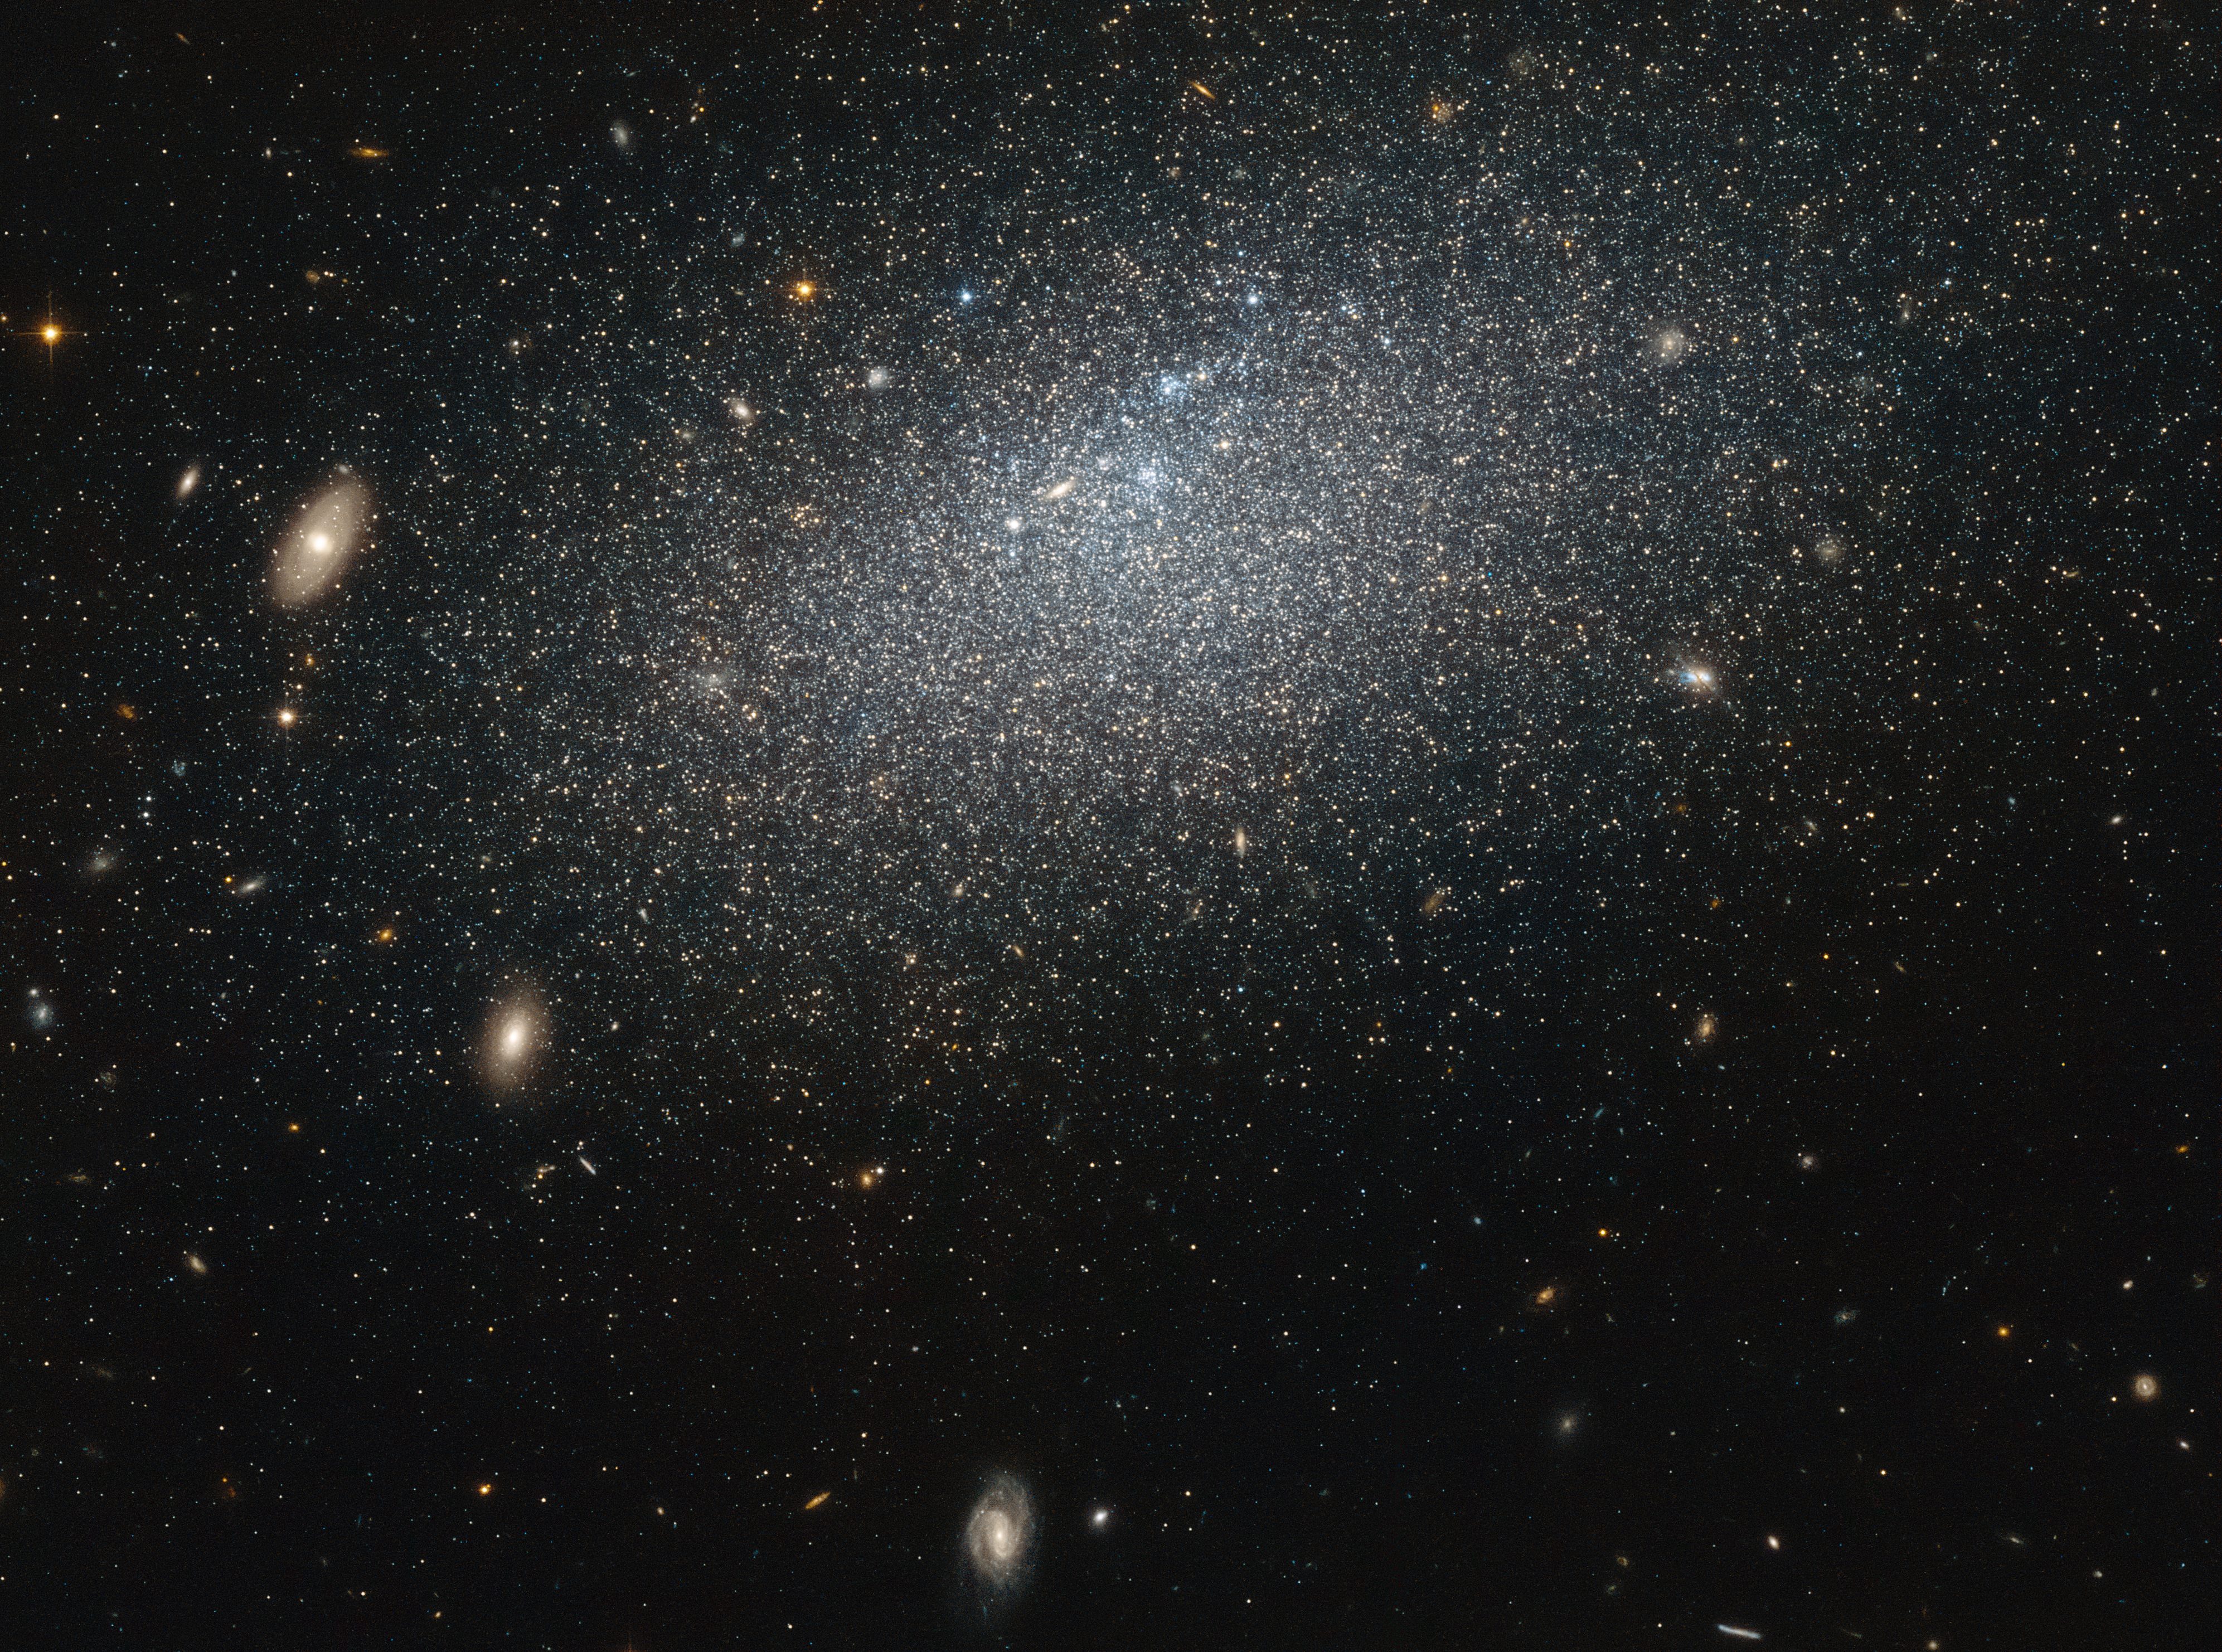

A mysterious hermit

The drizzle of stars scattered across this image forms a galaxy known as UGC 4879. UGC 4879 is an irregular dwarf galaxy — as the name suggests, galaxies of this type are a little smaller and messier than their cosmic cousins, lacking the majestic swirl of a spiral or the coherence of an elliptical.

This galaxy is also very isolated. There are about 2.3 million light years between UGC 4879 and its closest neighbour, Leo A, which is about the same distance as that between the Andromeda Galaxy and the Milky Way.

This galaxy’s isolation means that it has not interacted with any surrounding galaxies, making it an ideal laboratory for studying star formation uncomplicated by interactions with other galaxies. Studies of UGC 4879 have revealed a significant amount of star formation in the first 4-billion-years after the Big Bang, followed by a strange nine-billion-year lull in star formation, ended 1-billion-years ago by a more recent reignition. The reason for this behaviour, however, remains mysterious, and the solitary galaxy continues to provide ample study material for astronomers looking to understand the complex mysteries of starbirth throughout the Universe.

Credit: NASA & ESA